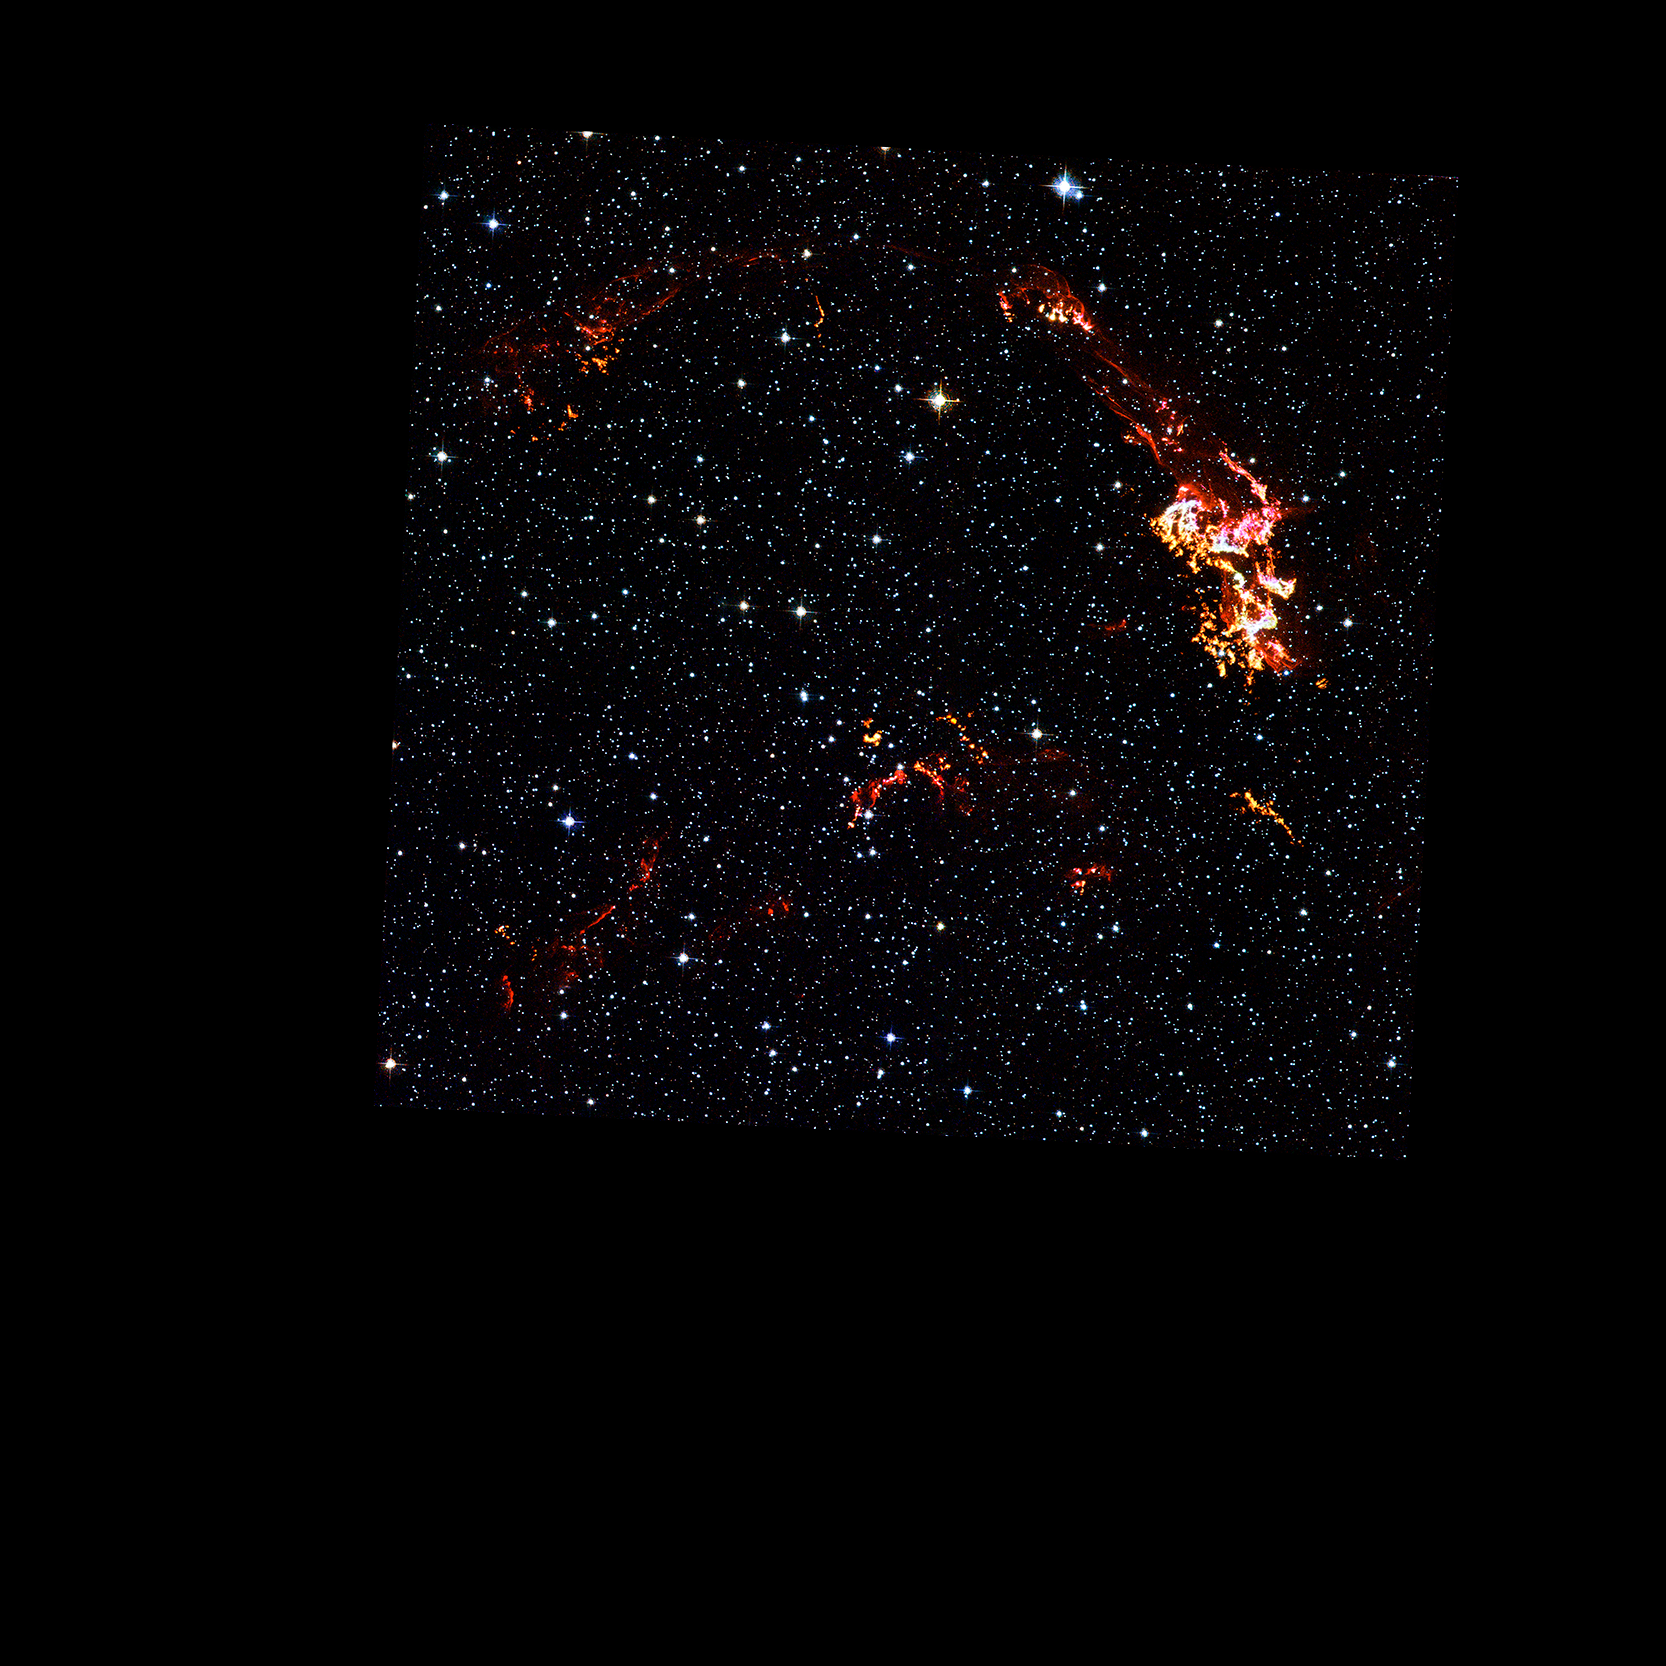

Hubble Space Telescope: Kepler's Supernova Remnant (visible-light data)

As the shock ploughs into material lost from the progenitor star after the initial supernova explosion, instabilities left in its wake cause the swept-up gas to fragment into clumps. The Hubble data also show thin filaments of gas. These filaments reveal where the shock wave is encountering lower-density, more uniform interstellar material.

Credit: NASA, ESA, R. Sankrit and W. Blair (Johns Hopkins University)